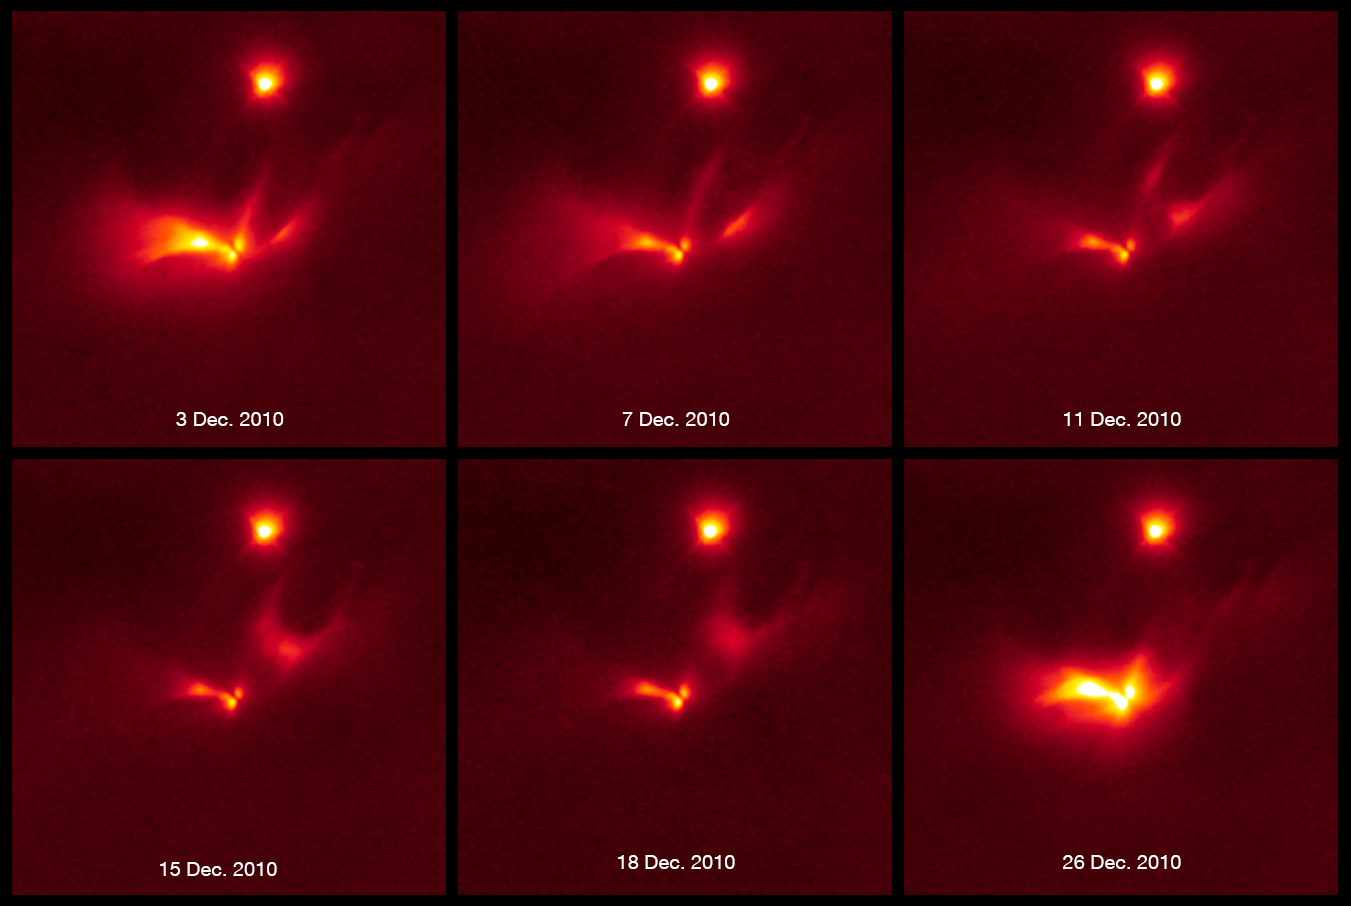

Light echo around LRLL 54361

This sequence of images from the NASA/ESA Hubble Space Telescope shows a pulse of light emanating from the protostellar object LRLL 54361. Most if not all of this light results from scattering off circumstellar dust in the protostellar envelope.

An apparent edge-on disk visible at the centre of the object, and three separate structures are interpreted as outflow cavities. The extent and shape of the scattered light changes substantially over a 25.3-day period.

This is caused by the propagation of the light pulse through the nebula. Astronomers propose that the flashes are due to material in a circumstellar disk suddenly being dumped onto a binary pair of forming stars. This unleashes a blast of radiation each time the stars get close to each other in their orbit.

These near-infrared light images are from Hubble’s Wide Field Camera 3.

Credit: NASA, ESA, and J. Muzerolle (STScI)